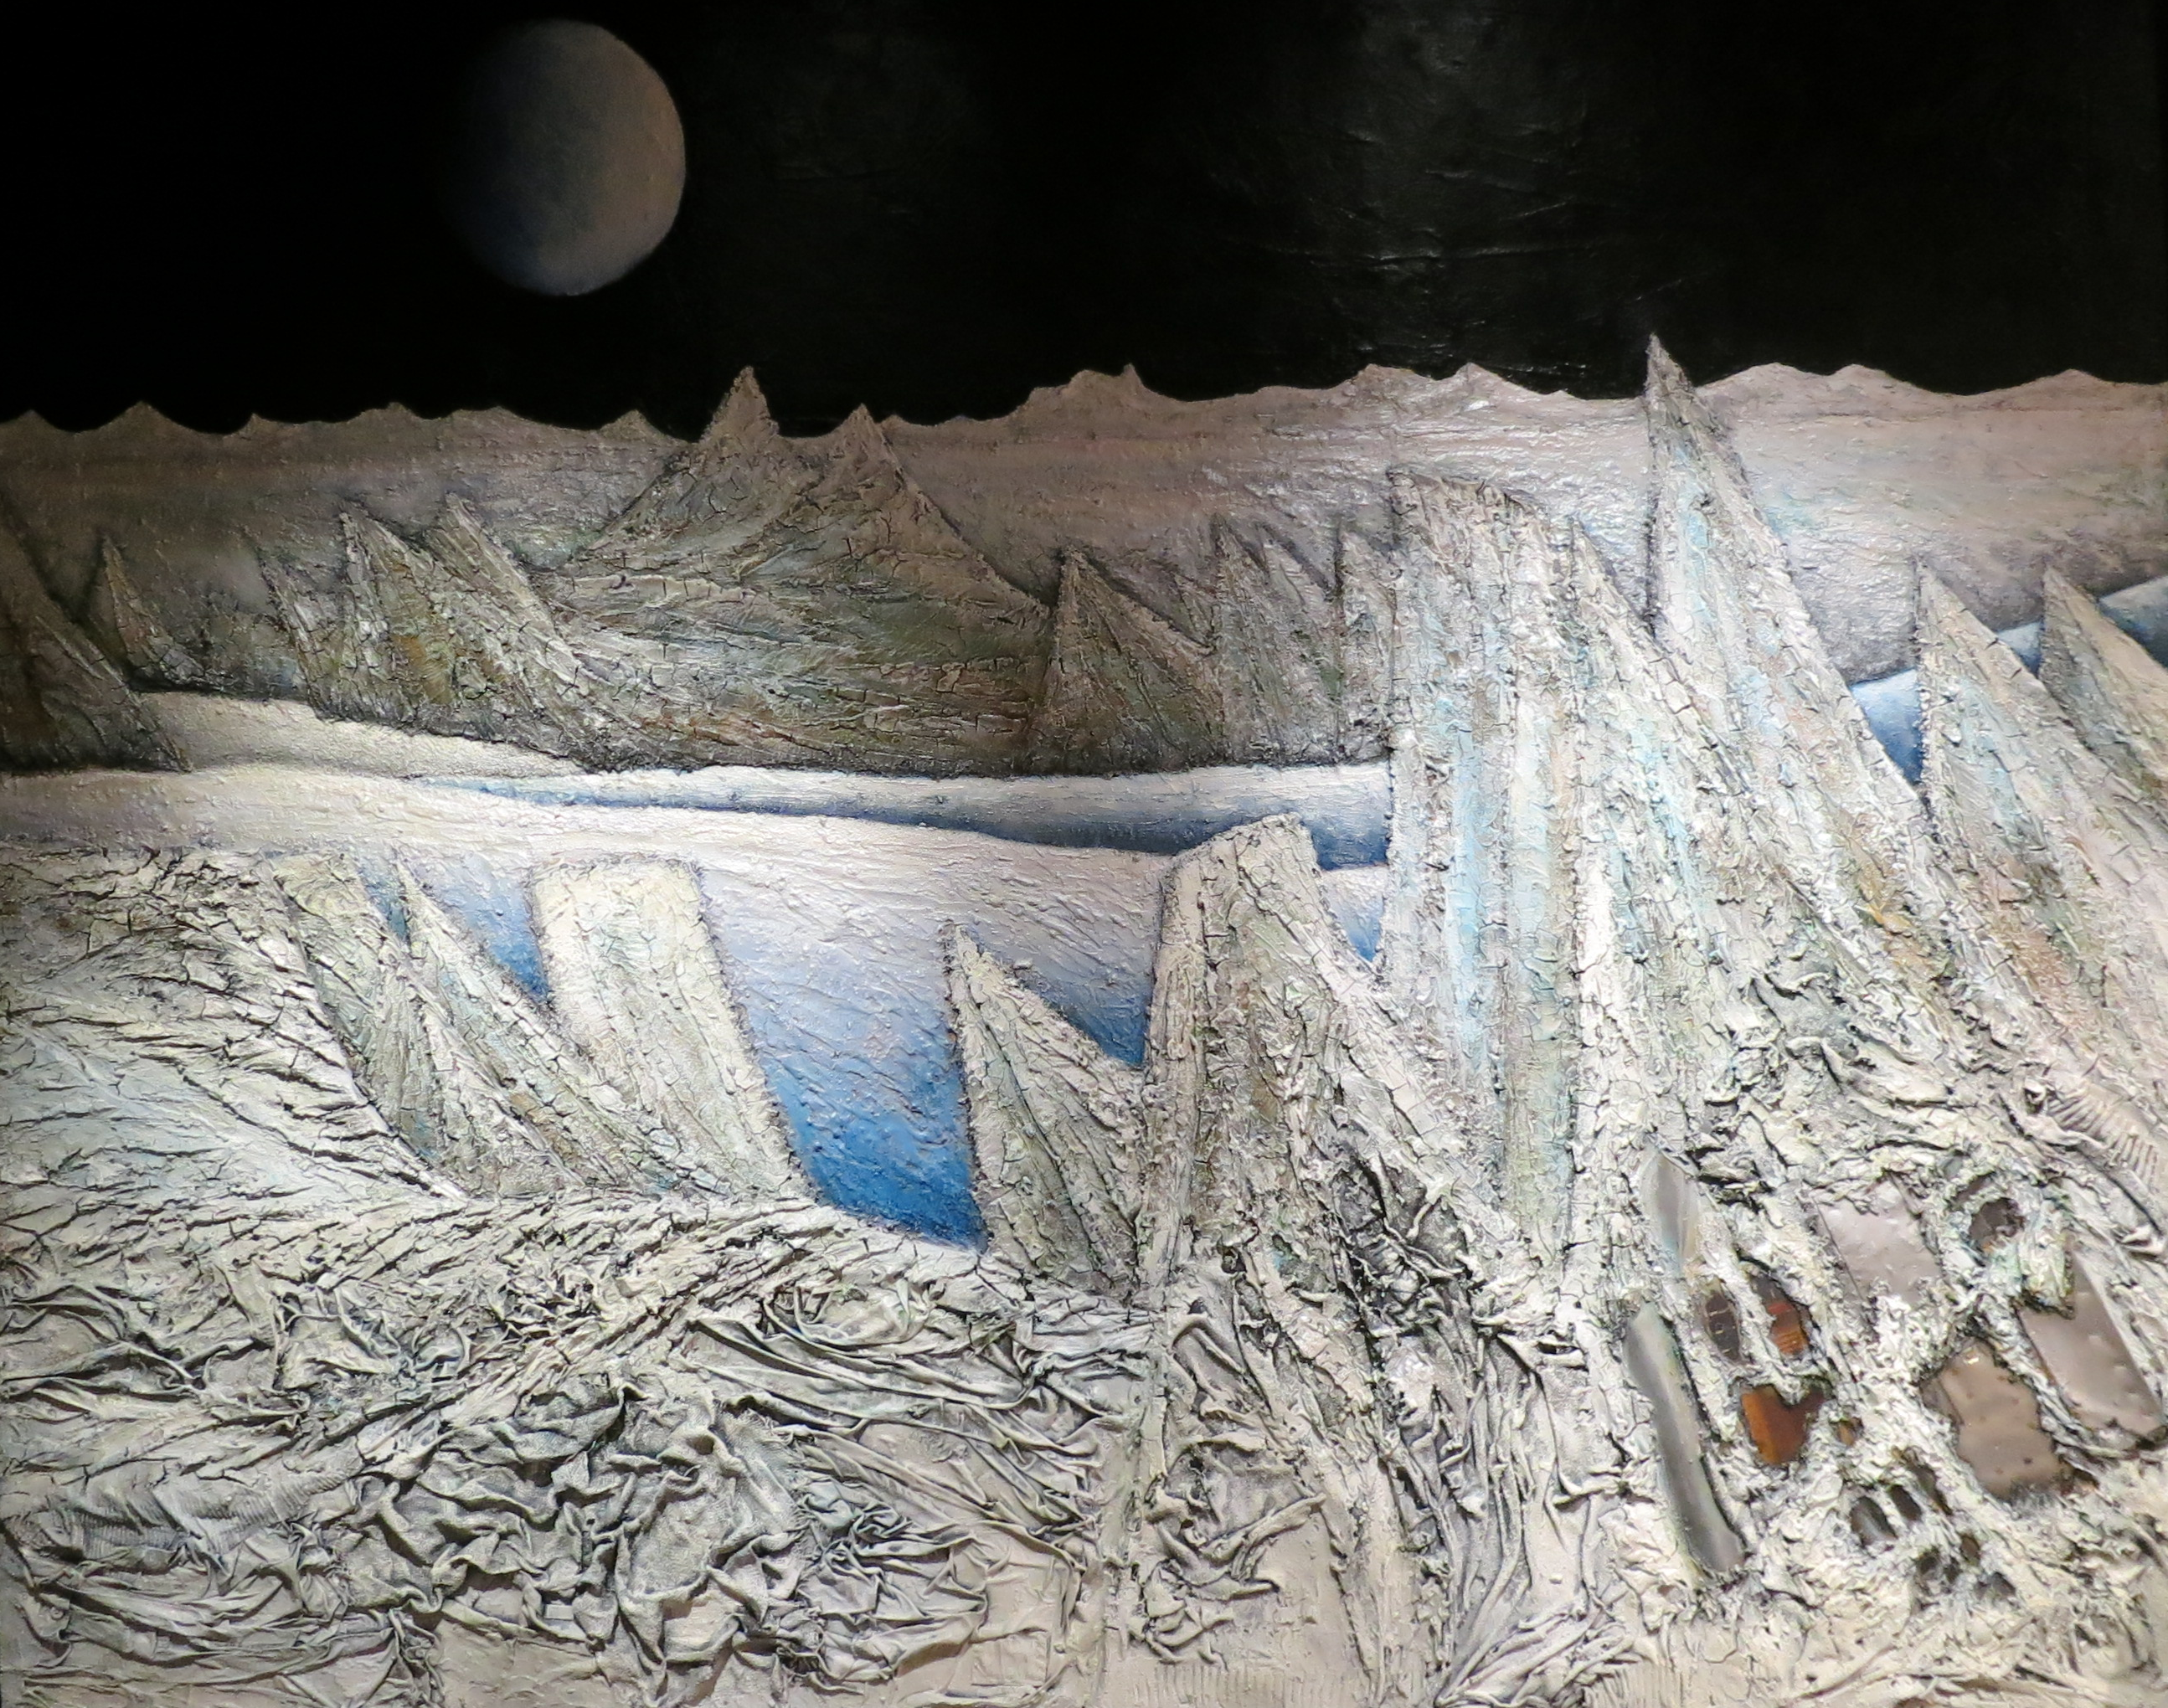

Painting from Mario Paschetta

This painting from the Italian artist Mario Paschetta is part of the Hubble travelling exhibition Our Place in Space. It was already on display in Venice and Chiavenna and will soon be part of the exhibition in the ESO Supernova Planetarium & Visitor Centre.

Credit: ESA/Hubble, M. Jäger